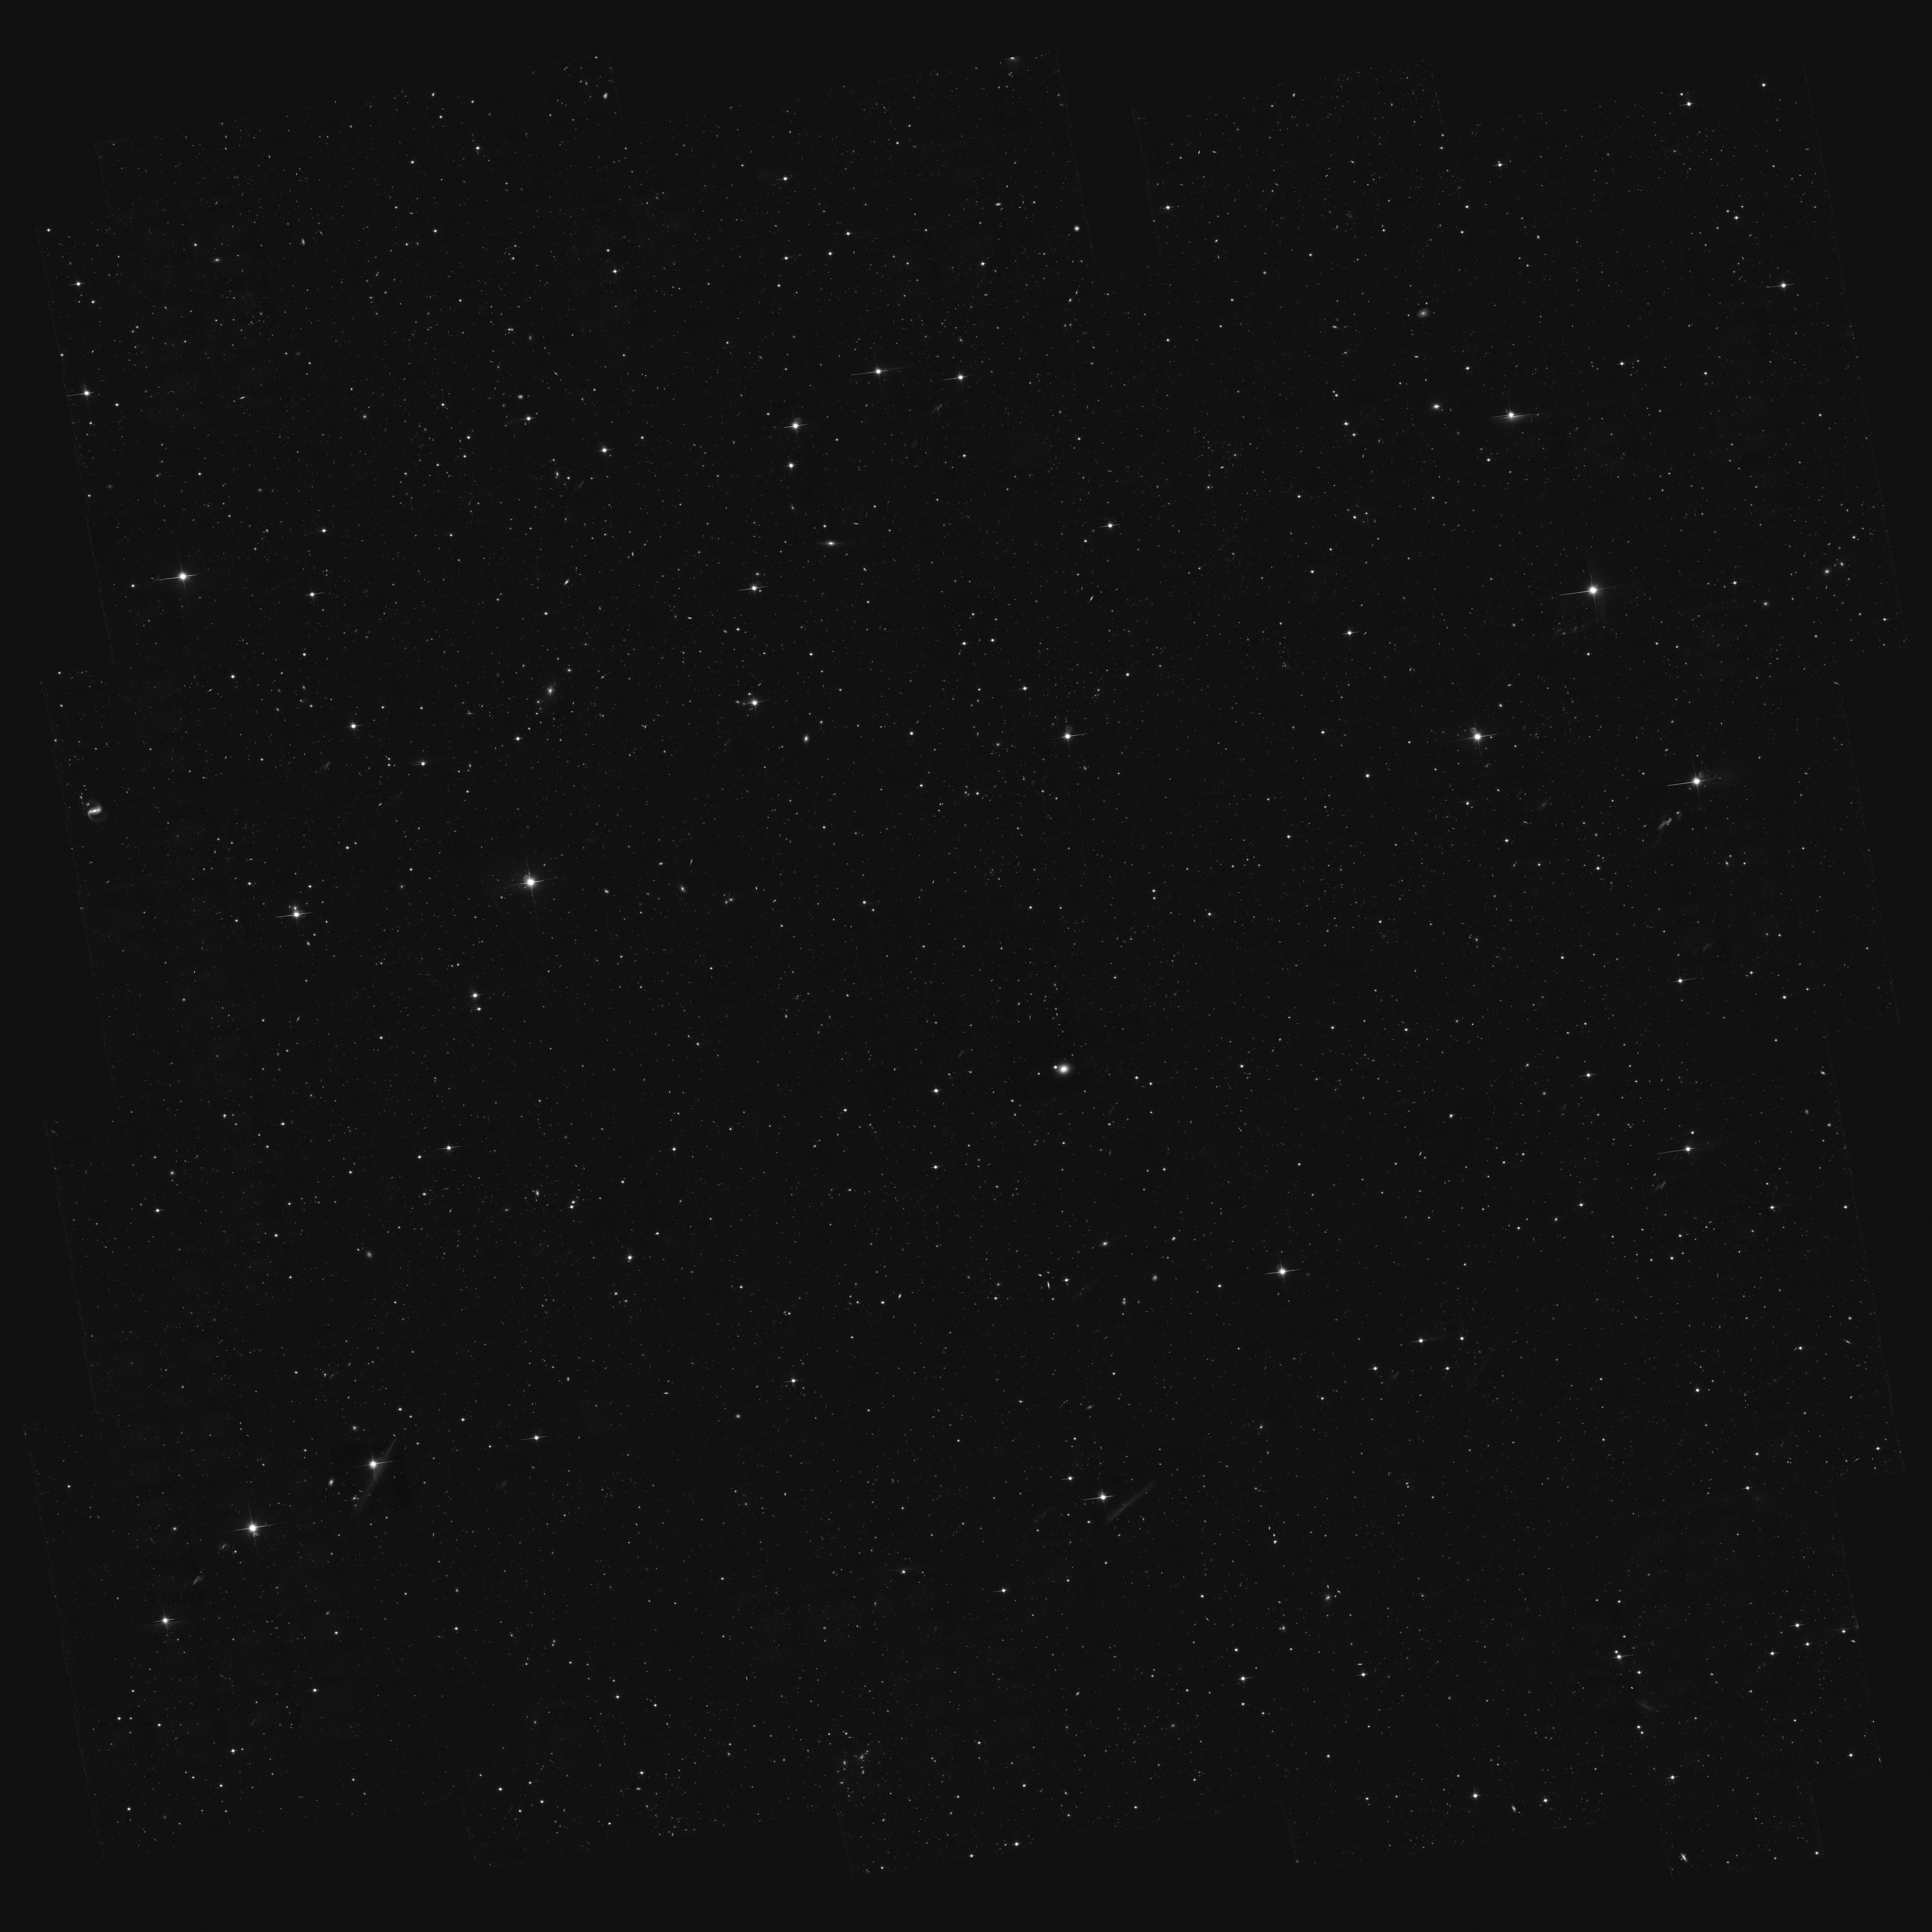

The full COSMOS survey field

This image shows the full COSMOS field at one tenth resolution. COSMOS - the Cosmic Evolution Survey - is the Hubble Space Telescope's largest ever survey of the Universe and was carried out by an international team of 70 astronomers. In making the COSMOS survey, Hubble photographed 575 adjacent and slightly overlapping views of the universe using the Advanced Camera for Surveys' (ACS) Wide Field Camera onboard Hubble. It took nearly 1,000 hours of observations. The distances to the galaxies were determined from their spectral redshifts, using ESO's Very Large Telescope, the Subaru and CFHT telescopes in Hawaii and the Magellan telescope in Chile.

At full resolution the image would be 100,800 x 100,800 pixels. The image was taken in near-infrared light (Hubble's F814W, or I-band, filter).

Credit: NASA, ESA and A. Koekemoer (STScI)